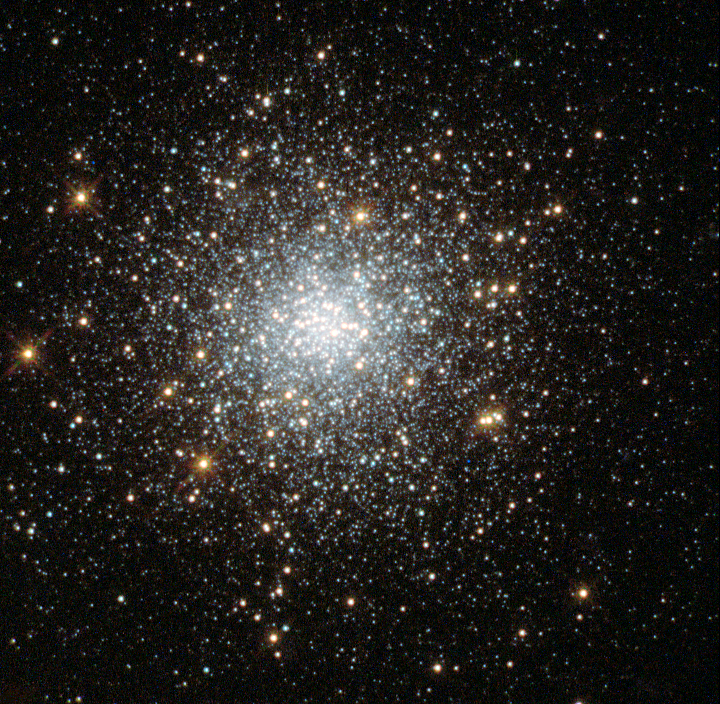

Globular cluster Fornax 5

This NASA/ESA Hubble Space Telescope image shows the globular cluster Fornax 5 in the dwarf galaxy Fornax.

New observations of this cluster and three others in the galaxy show that they are very similar to those found in our galaxy, the Milky Way. The finding is at odds with leading theories on how these clusters form — in these theories, globular clusters should be nestled among large quantities of old stars — and so the mystery of how these objects came to exist deepens.

This cluster’s position within the galaxy is shown in image G.

Credit: NASA, ESA, S. Larsen (Radboud University, the Netherlands)